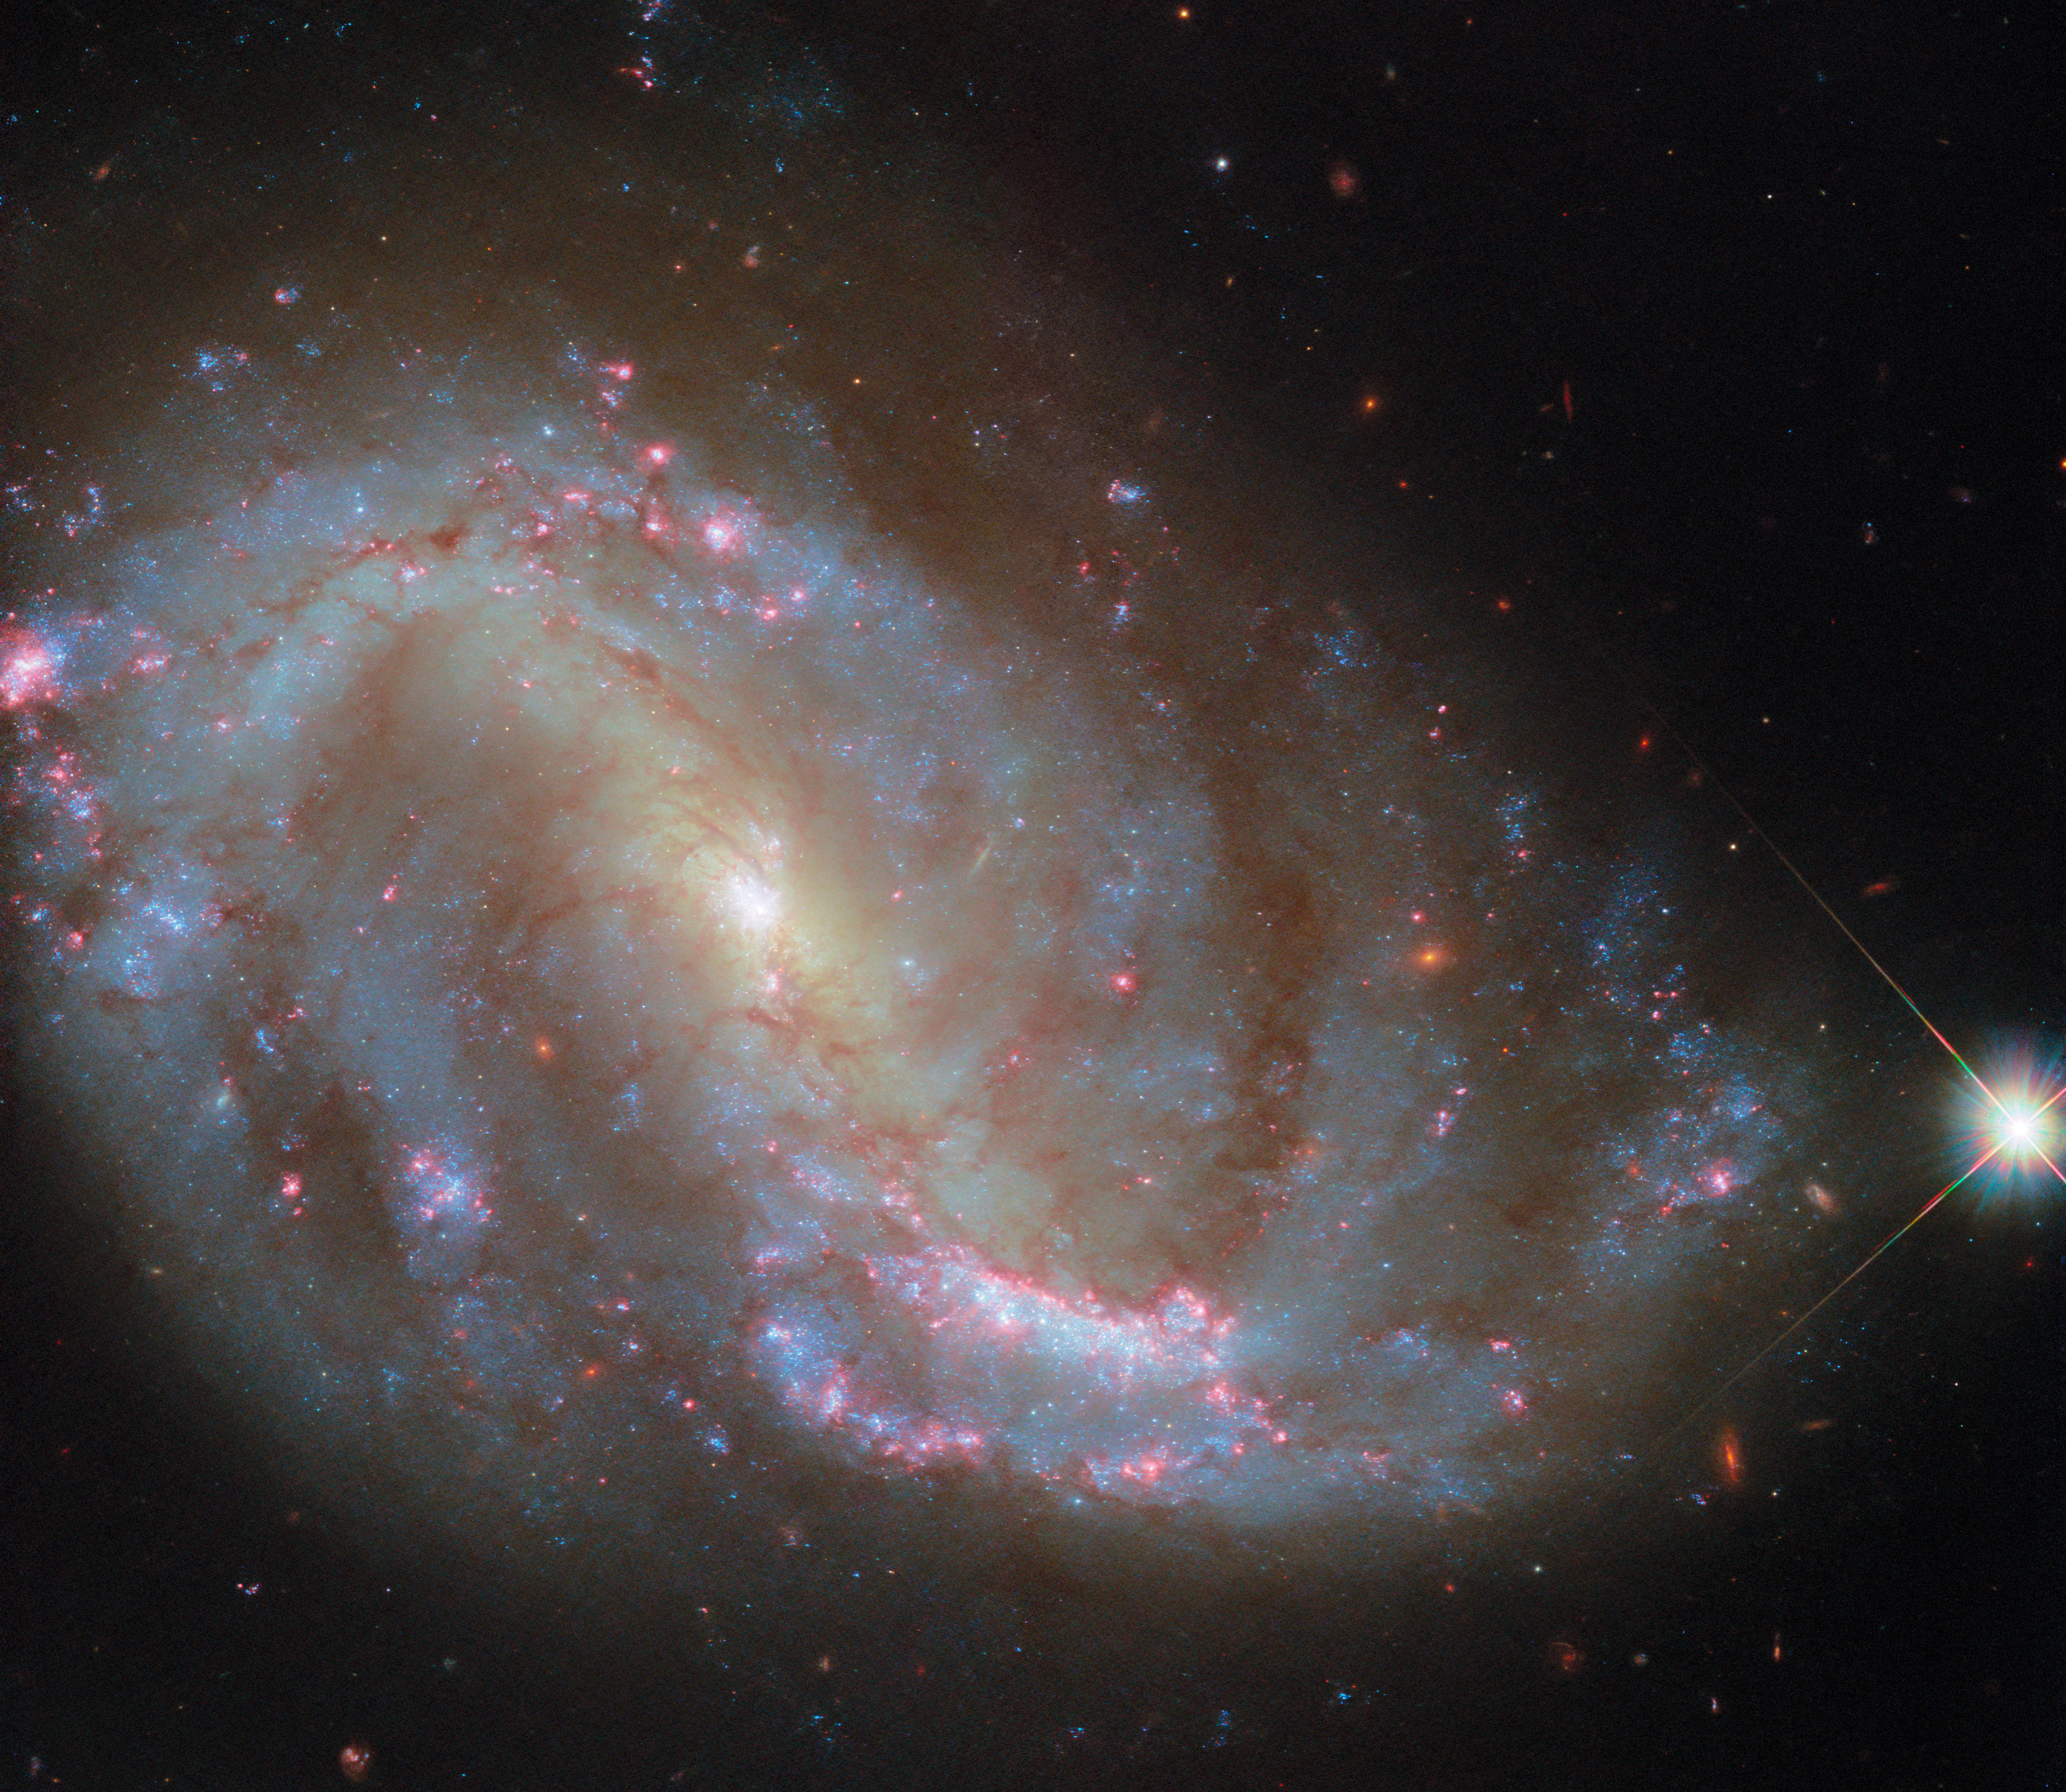

A well-studied spiral

The celestial object that is displayed in this NASA/ESA Hubble Space Telescope Picture of the Week is NGC 7496, a galaxy located over 24 million light-years away in the constellation Grus (The Crane). NGC 7496 is a dusty spiral galaxy with a bar of stars stretching across its centre. Adding to its intrigue is an active galactic nucleus: a supermassive black hole that feasts on gas at the very heart of the galaxy.

Astronomers have observed NGC 7496 at wavelengths from radio to ultraviolet in order to study the galaxy’s active galactic nucleus, dust clouds, and star formation. Hubble first observed this galaxy as part of the Physics at High Angular resolution in Nearby GalaxieS (PHANGS) programme. This programme has enlisted the abilities of several powerful astronomical observatories, including the Atacama Large Millimetre/submillimetre Array (ALMA), the Very Large Telescope, and the NASA/ESA/CSA James Webb Space Telescope, in addition to Hubble. NGC 7496 was the first galaxy in the PHANGS sample that Webb observed.

Each of these observatories offers a different perspective on this well-studied galaxy. With its unique ultraviolet capabilities and fine resolution, Hubble’s view reveals young star clusters bursting with high-energy radiation. Hubble’s observations of NGC 7496 help to reveal the ages and masses of these young stars, as well as the extent to which their starlight is blocked by dust.

A previous Hubble image of NGC 7496 was released in 2022. Today’s image incorporates new data that highlight the galaxy’s star clusters, which are surrounded by glowing red clouds of hydrogen gas. Astronomers collected these data in order to study nebulae like those that massive stars leave behind when they explode as supernovae and those from which newborn stars are made.

Credit: ESA/Hubble & NASA, R. Chandar, J. Lee and the PHANGS-HST team